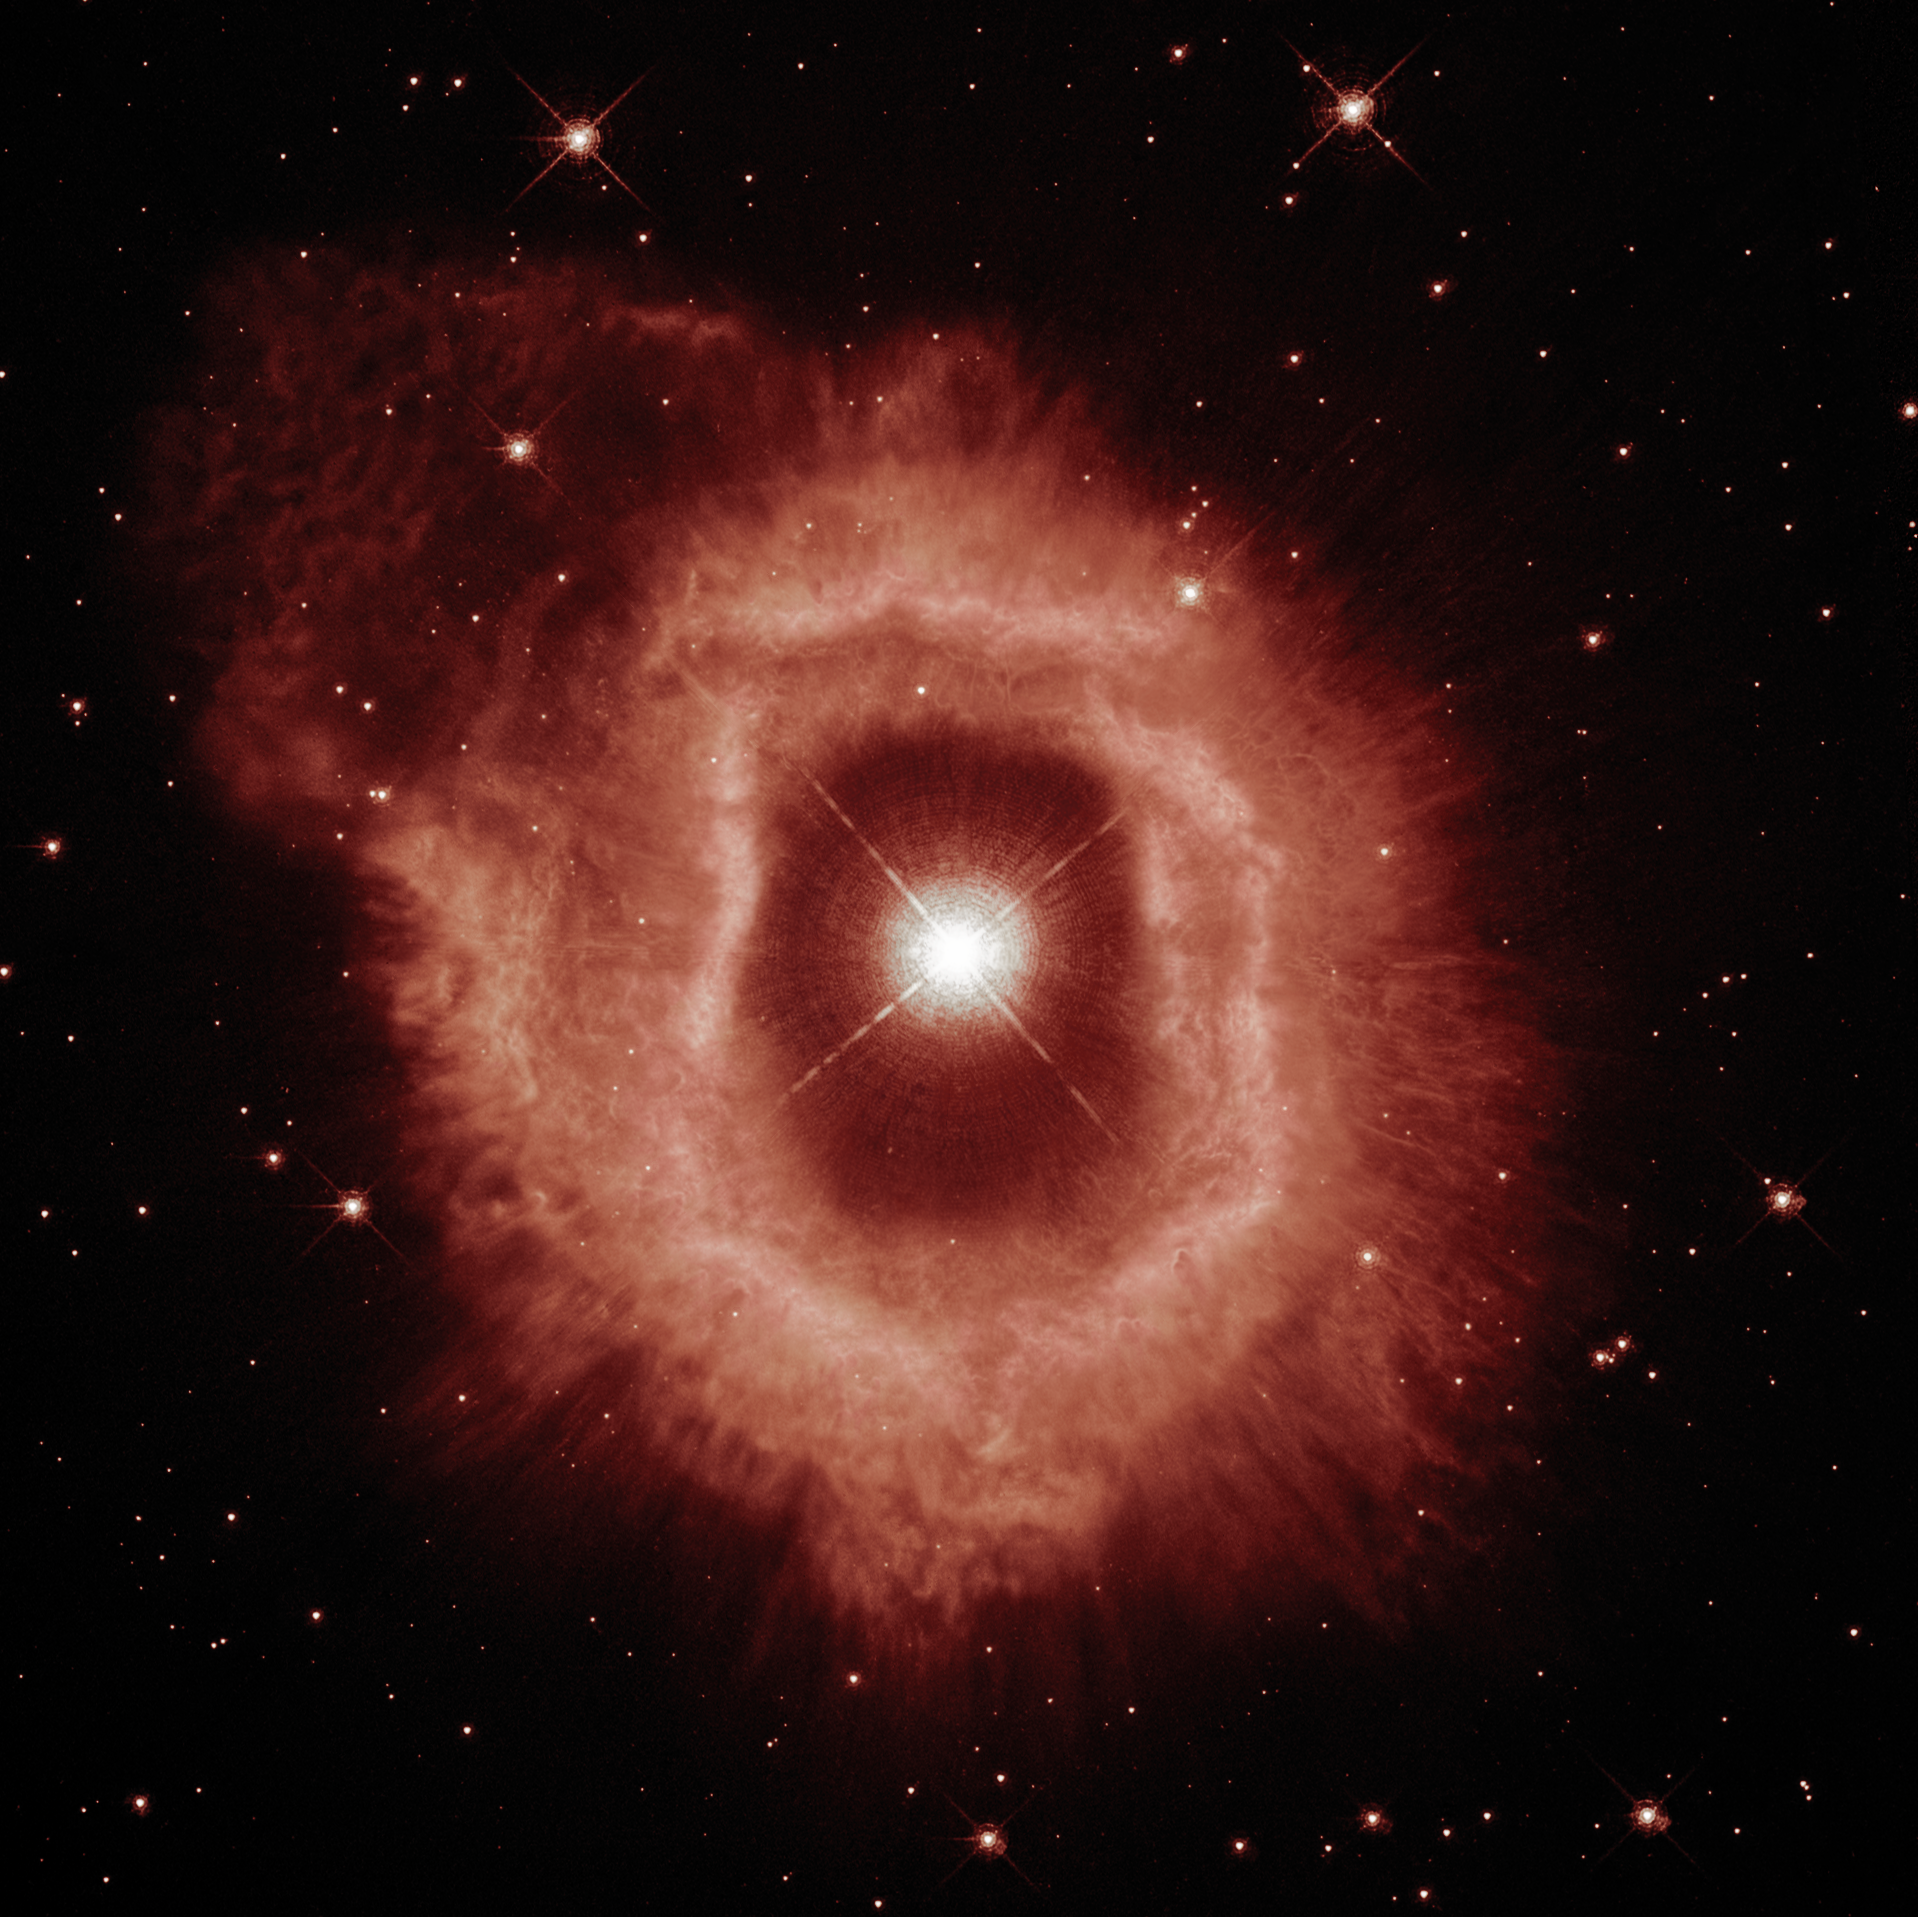

A Closer Look at Hubble’s 31st Anniversary Snapshot

This comparison view shows puffing dust bubbles and an erupting gas shell — the final acts of a monster star.You can explore the detail of the nebula surrounding the star AG Carinae by using the slider tool on the image above.

This Picture of the Week showcases new views of the dual nature of the star AG Carinae, which was the target of the NASA/ESA Hubble Space Telescope’s 31st anniversary image in April 2020. This new perspective was developed thanks to Hubble’s observations of the star in 2020 and 2014, along with others captured by the telescope’s WFPC2 instrument in 1994. You can compare these two new versions of AG Carinae by using the slider tool on the image above.

The first image showcases the details of the ionised hydrogen and ionised nitrogen emissions from the nebula (seen here in red). In the second image, the blue demonstrates the contrasting appearance of the distribution of the dust that shines of reflected stellar light. Astronomers believe that the dust bubbles and filaments formed within and were shaped by powerful stellar wind .

This giant star is waging a tug-of-war between gravity and radiation to avoid self-destruction. The star is surrounded by an expanding shell of gas and dust — a nebula — that is shaped by the powerful winds emanating from the star. The nebula is about five light-years wide, equal to the distance from here to our nearest star, Alpha Centauri.

AG Carinae is formally classified as a Luminous Blue Variable because it is hot (blue), very luminous, and variable. Such stars are quite rare because there are not many stars that are so massive. Luminous Blue Variable stars continuously lose mass in the final stages of their life, during which a significant amount of stellar material is ejected into the surrounding interstellar space, until enough mass has been lost that the star has reached a stable state.

AG Carinae is surrounded by a spectacular nebula, formed by material ejected by the star during several of its past outbursts. The nebula is approximately 10 000 years old, and the observed velocity of the gas is approximately 70 kilometres per second. While this nebula looks like a ring, it is in fact a hollow shell rich in gas and dust, the centre of which has been cleared by the powerful stellar wind travelling at roughly 200 kilometres per second. The gas (composed mostly of ionised hydrogen and nitrogen) is visible to us in these images as a thick bright red ring, which appears doubled in places — possibly the result of several outbursts colliding into each other. The dust, here visible in blue, has formed in clumps, bubbles and filaments that are shaped by the stellar wind.

Scientists who observed the star and its surrounding nebula note that the ring is not perfectly spherical; it appears to have a bipolar symmetry, indicating that the mechanism producing the outburst may have been caused by the presence of a disc in the centre, or that the star is not alone but might have a companion (known as a binary star). An alternative and simpler theory is that the star rotates very fast (as many massive stars have been found to do).

Credit: ESA/Hubble and NASA, A. Nota, C. Britt